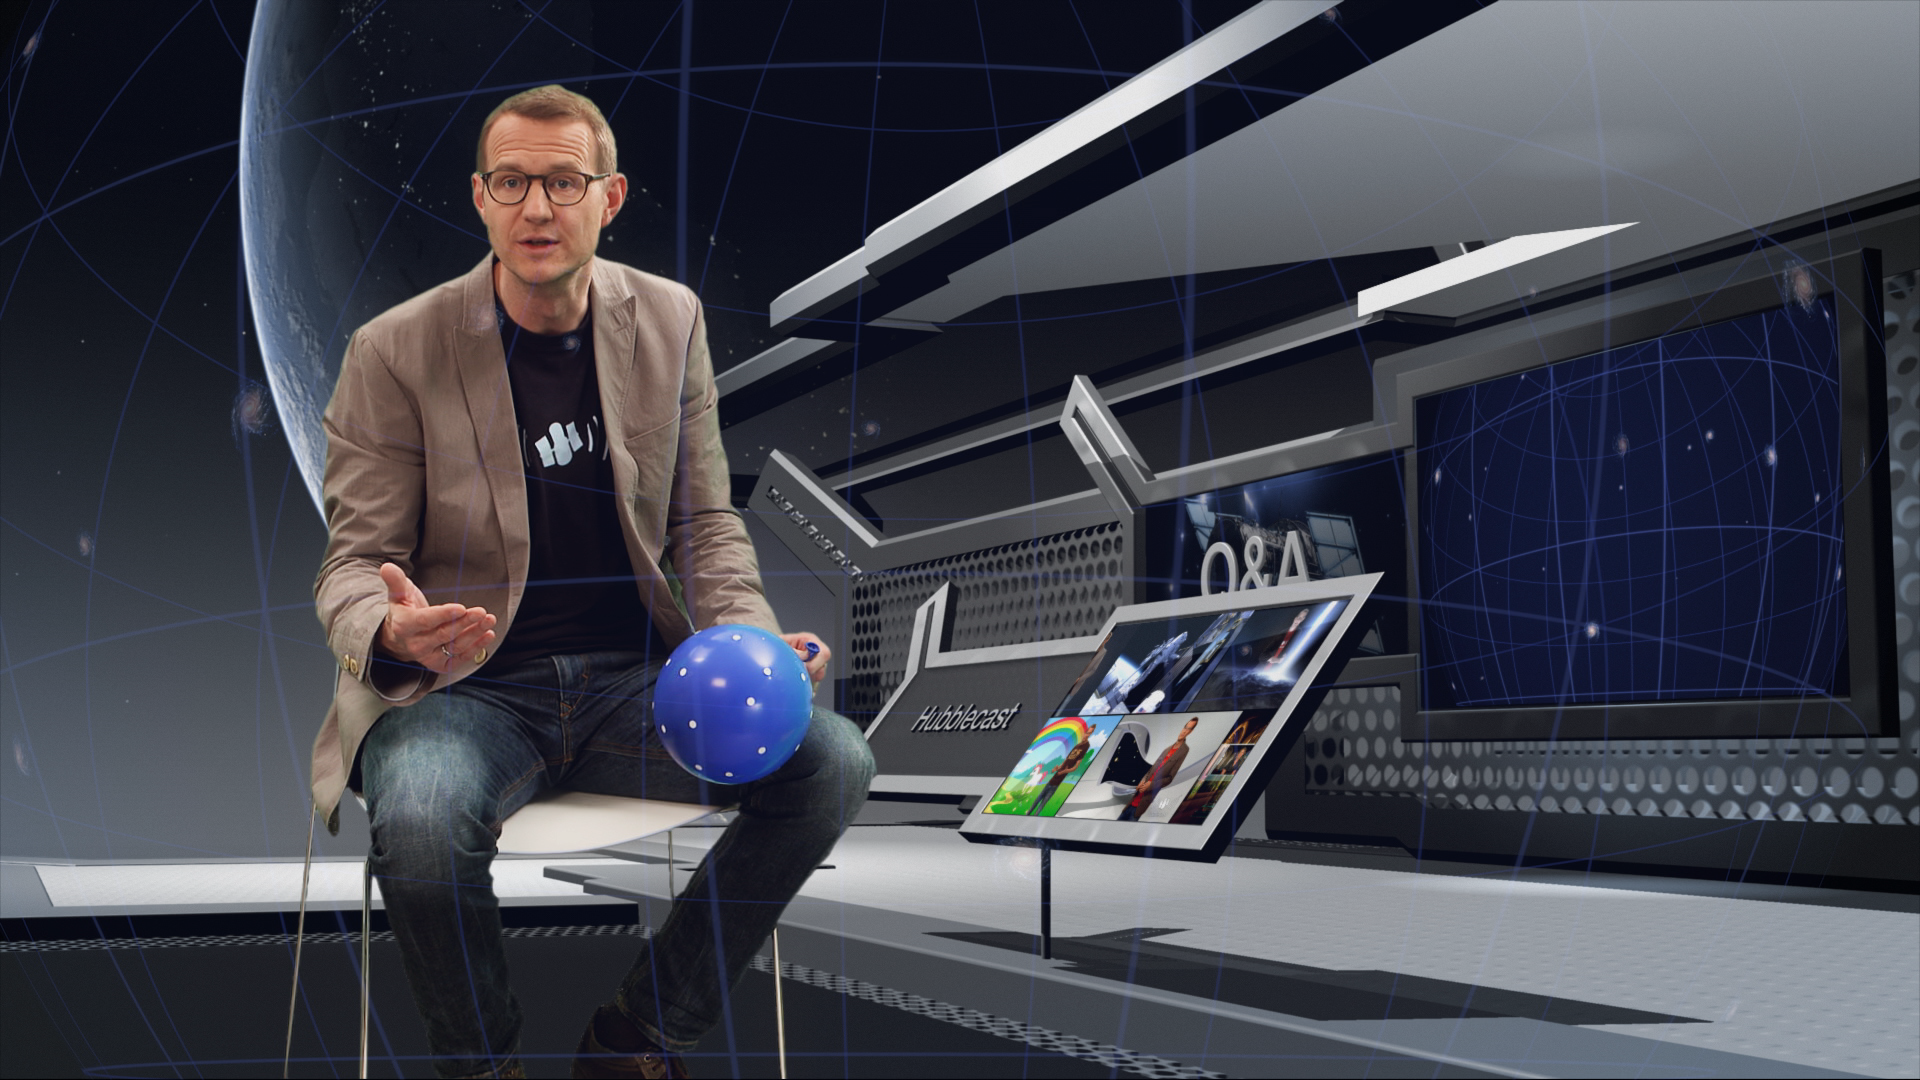

Screenshot from Hubblecast 79: Q&A with Dr J part 2

This image is a screenshot from Hubblecast 79: Q&A with Dr J part 2.

In the summer of 2014 we asked the public to send us their Hubble- and astronomy-related questions, and the response was incredible!

In this episode Dr J answers a selection of the questions about science related to Hubble.

These range from questions about what Hubble has achieved within the Solar System, to the science that it has uncovered at the very edge of the observable Universe. In this episode Dr J explains some of the key concepts, and biggest misconceptions, about the Universe we live in.

Credit: NASA, ESA/Hubble